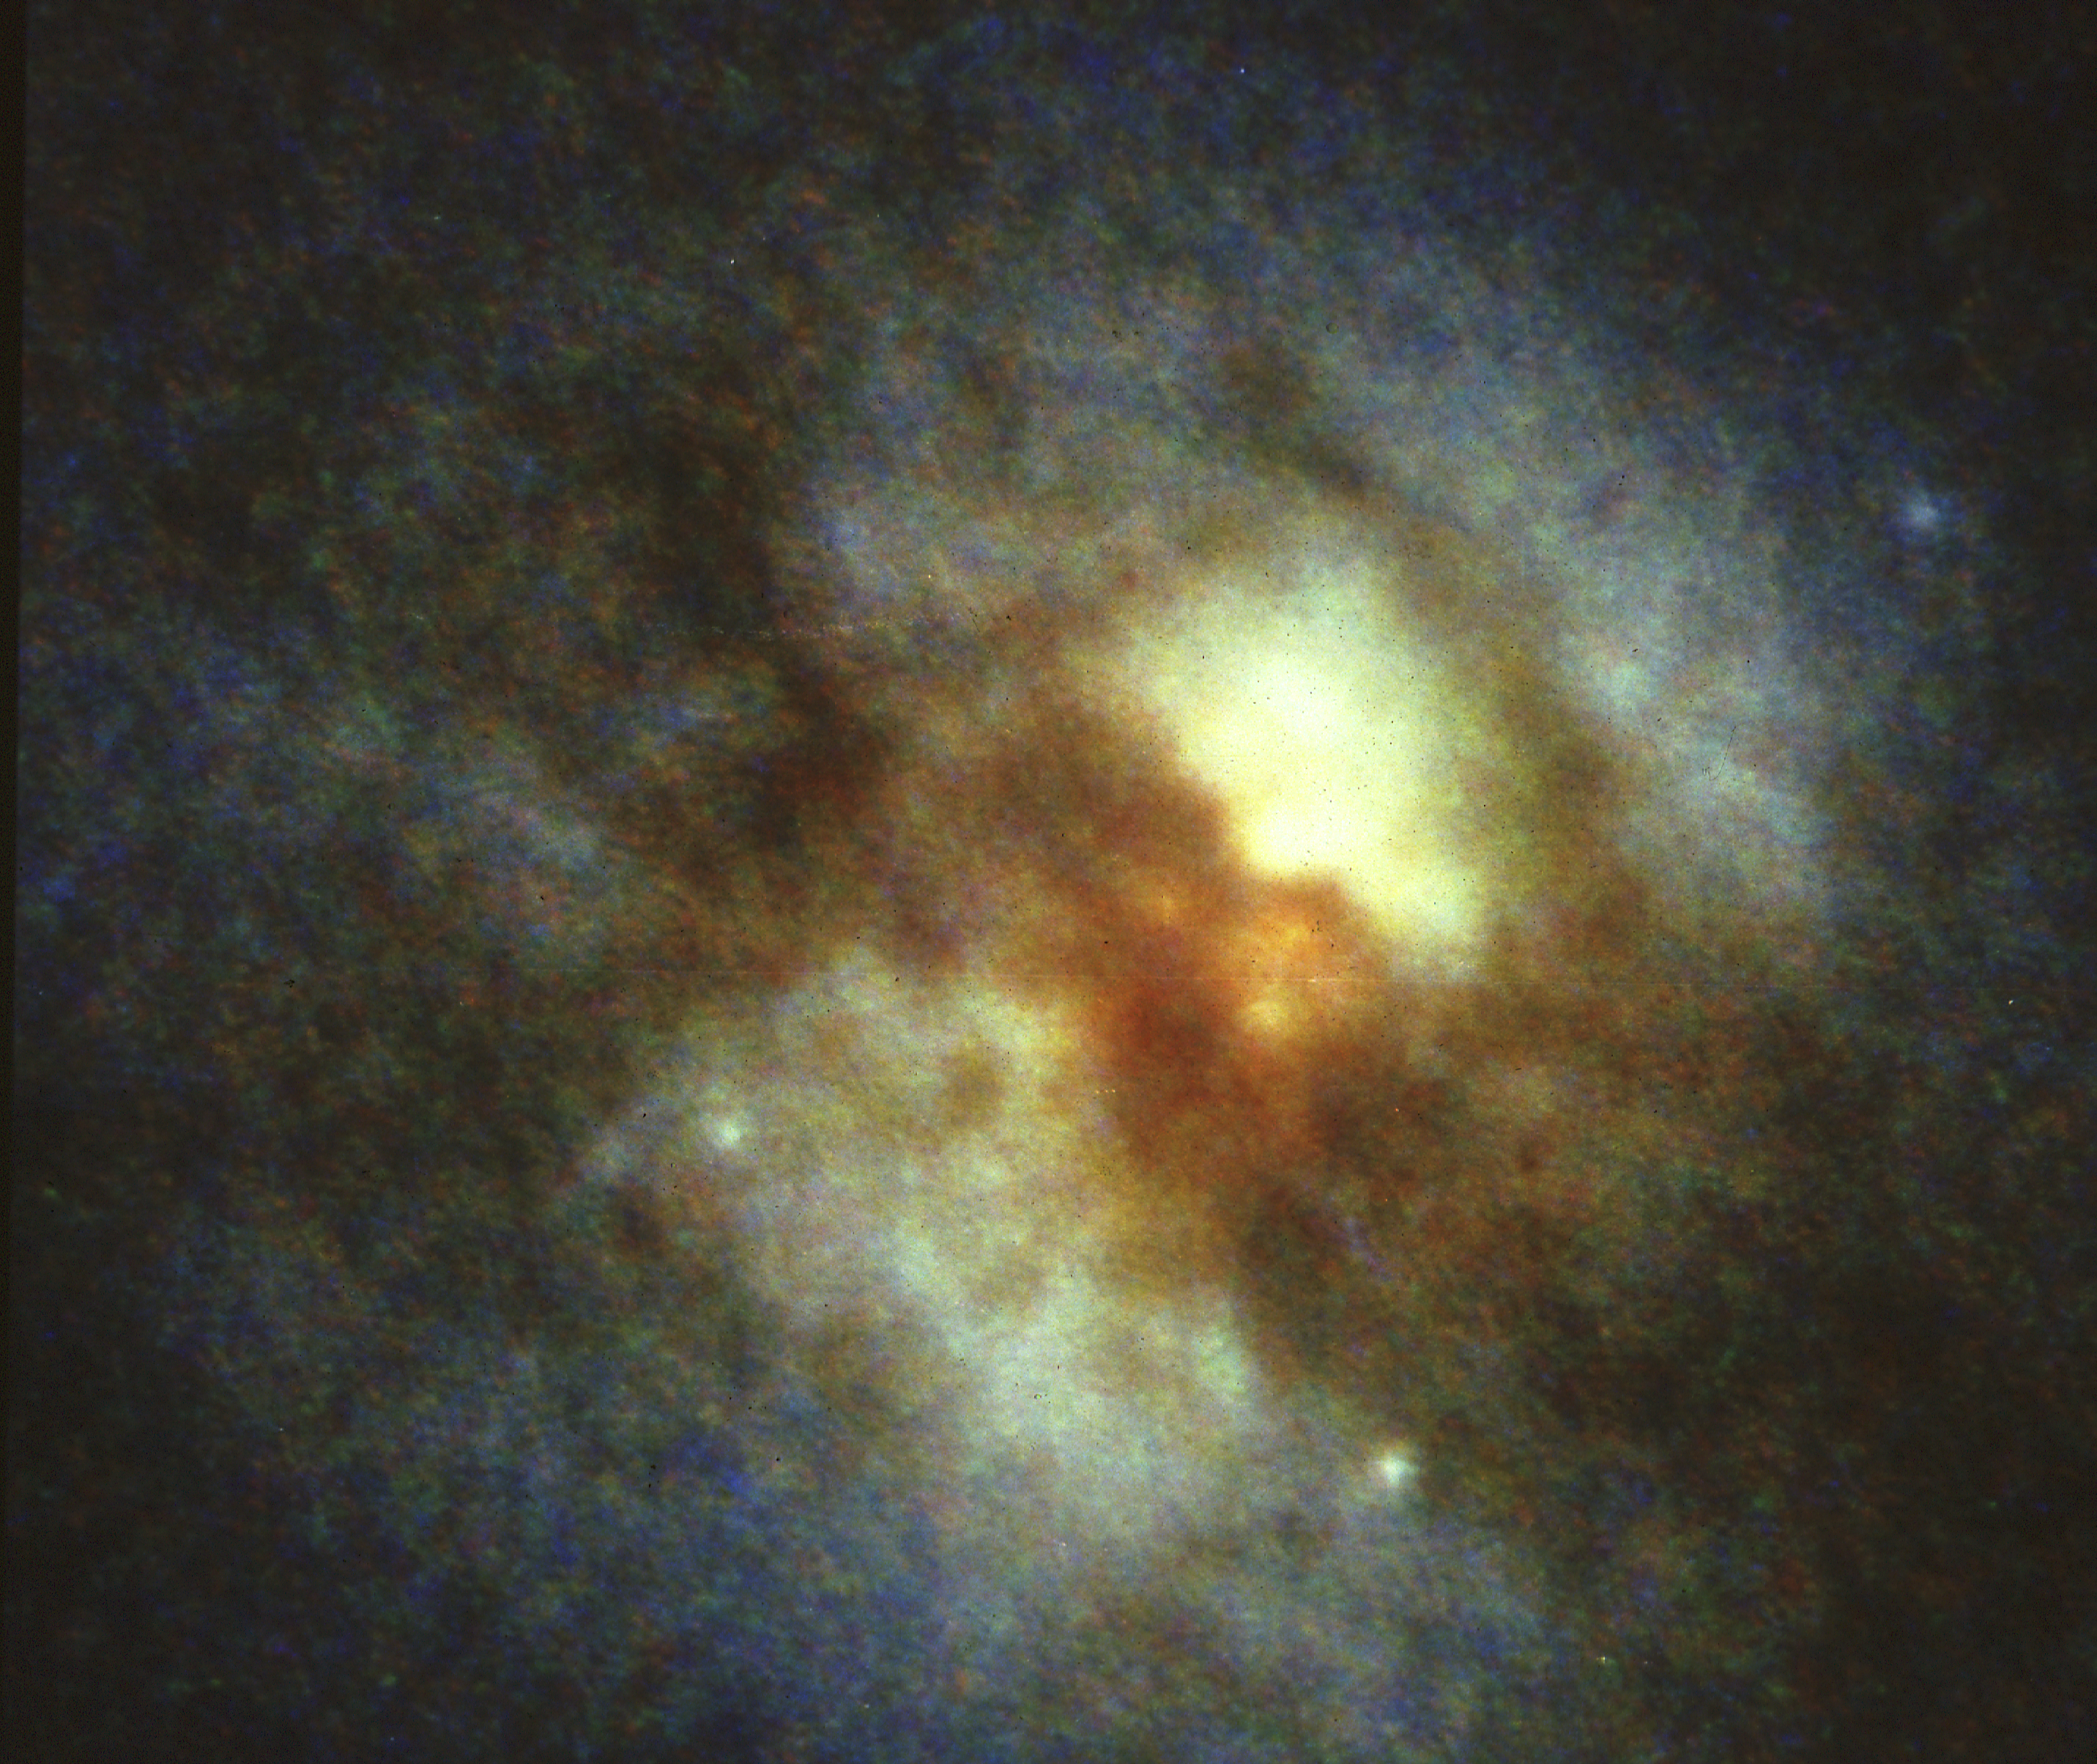

HST planetary camera images of core of peculiar galaxy Arp 220

An image of the central part of the ultra-luminuous infrared galaxy Arp 220 taken with the WFPC on the Hubble Space Telescope. HST reveals a new complex structure within one arc second of the nucleus. While part of the this structure was seen in radio interfero-metric maps, most of the structure is new.

HST reveals a new class of object at the core: gigantic young star clusters which are ten times larger than any clusters observed previously. They were probably produces by the collision of two spiral galaxies. Stars are produced at a furious rate from the dust and gas supplied by the collision.

Credit: E. Shaya, D. Dowling/U. of Maryland, the WFPC Team, and NASA/ESA